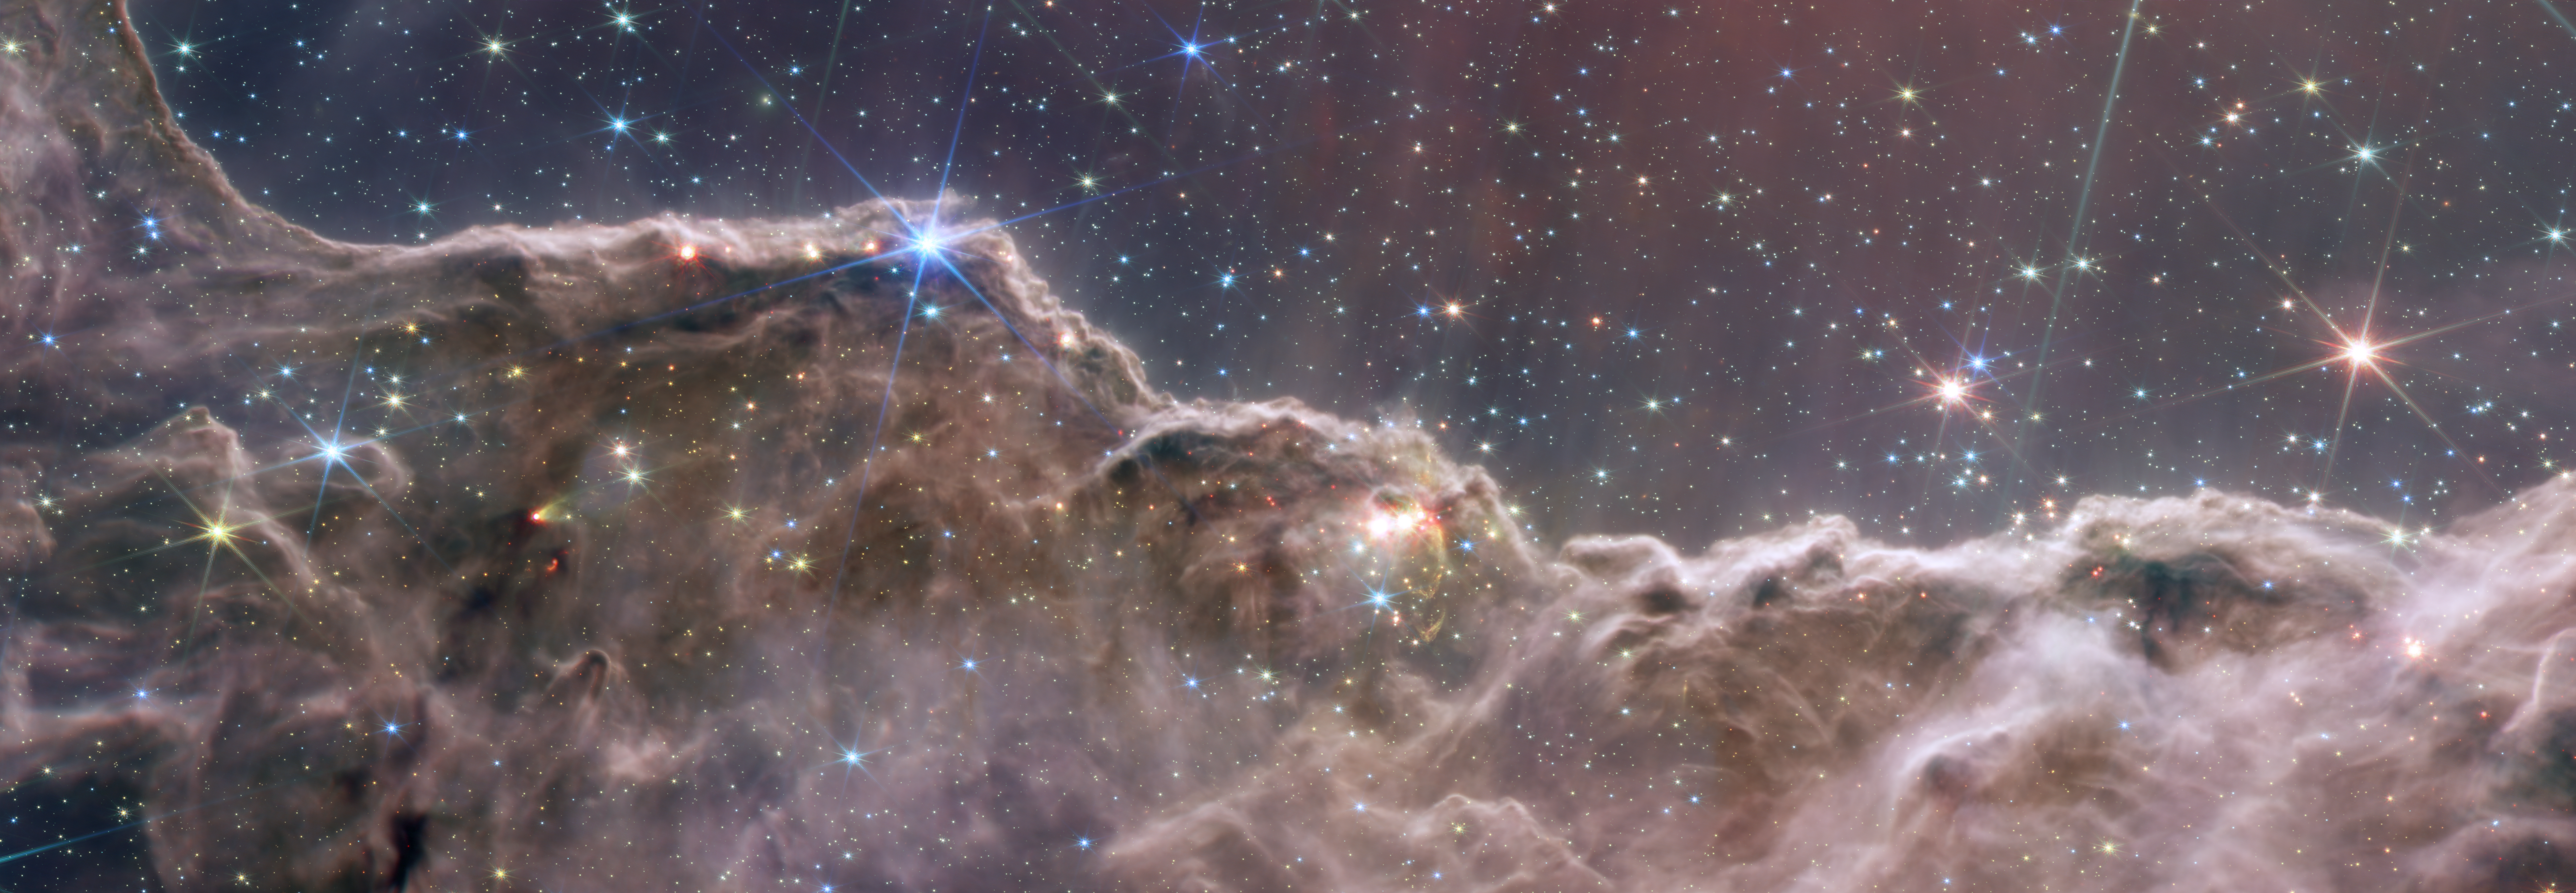

Combined NIRCam and MIRI Image of the “Cosmic Cliffs” in Carina

Astronomers using the NASA/ESA/CSA James Webb Space Telescope combined the capabilities of the telescope’s two cameras to create a never-before-seen view of a star-forming region in the Carina Nebula. Captured in infrared light by the Near-Infrared Camera (NIRCam) and Mid-Infrared Instrument (MIRI), this combined image reveals previously invisible areas of star birth.

What looks much like craggy mountains on a moonlit evening is actually the edge of a nearby, young, star-forming region known as NGC 3324. Called the Cosmic Cliffs, this rim of a gigantic, gaseous cavity is roughly 7,600 light-years away.

The cavernous area has been carved from the nebula by the intense ultraviolet radiation and stellar winds from extremely massive, hot, young stars located in the centre of the bubble, above the area shown in this image. The high-energy radiation from these stars is sculpting the nebula’s wall by slowly eroding it away.

NIRCam – with its crisp resolution and unparalleled sensitivity – unveils hundreds of previously hidden stars, and even numerous background galaxies. In MIRI’s view, young stars and their dusty, planet-forming disks shine brightly in the mid-infrared, appearing pink and red. MIRI reveals structures that are embedded in the dust and uncovers the stellar sources of massive jets and outflows. With MIRI, the organic, soot-like material on the surface of the ridges glows, giving the appearance of jagged rocks.

Several prominent features in this image are described below.

The faint “steam” that appears to rise from the celestial “mountains” is actually hot, ionised gas and hot dust streaming away from the nebula due to intense, ultraviolet radiation.
Peaks and pillars rise above the glowing wall of gas, resisting the blistering ultraviolet radiation from the young stars.
Bubbles and cavities are being blown by the intense radiation and stellar winds of newborn stars.
Protostellar jets and outflows, which appear in gold, shoot from dust-enshrouded, nascent stars. MIRI uncovers the young, stellar sources producing these features. For example, a feature at left that looks like a comet with NIRCam is revealed with MIRI to be one cone of an outflow from a dust-enshrouded, newborn star.
A “blow-out” erupts at the top-centre of the ridge, spewing material into the interstellar medium. MIRI sees through the dust to unveil the star responsible for this phenomenon.
An unusual “arch,” looking like a bent-over cylinder, appears in all wavelengths shown here.

This period of very early star formation is difficult to capture because, for an individual star, it lasts only about 50,000 to 100,000 years – but Webb’s extreme sensitivity and exquisite spatial resolution have chronicled this rare event.

NGC 3324 was first catalogued by James Dunlop in 1826. Visible from the Southern Hemisphere, it is located at the northwest corner of the Carina Nebula (NGC 3372), which resides in the constellation Carina. The Carina Nebula is home to the Keyhole Nebula and the active, unstable supergiant star called Eta Carinae.

NIRCam was built by a team at the University of Arizona and Lockheed Martin’s Advanced Technology Center.

MIRI was developed as a partnership between NASA and ESA (European Space Agency), with NASA’s Jet Propulsion Laboratory leading the U.S. efforts and a multi-national consortium of European astronomical institutes contributing for ESA.

For a full array of Webb’s first images and spectra, including downloadable files, please visit: https://esawebb.org/initiatives/webbs-first-images/

Credit: NASA, ESA, CSA, and STScI